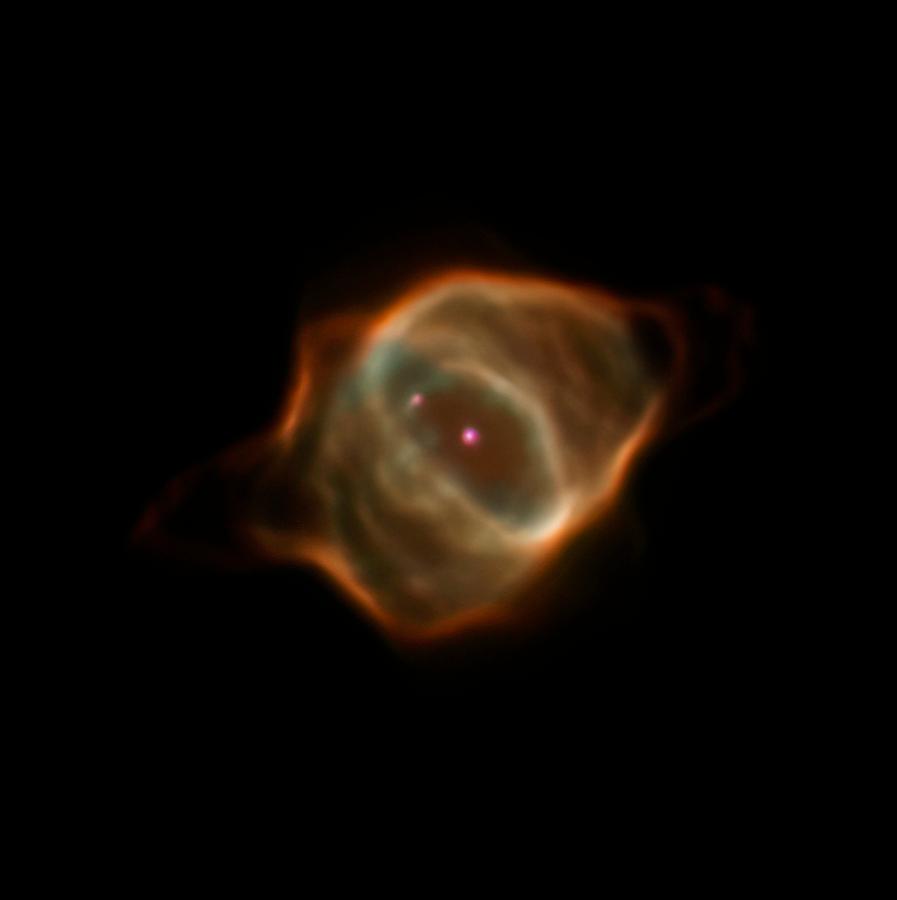

Hubble’s Observation of the Stingray Nebula in 2016

Archival data from the NASA/ESA Hubble Space Telescope reveal that the nebula Hen 3-1357, nicknamed the Stingray nebula, has faded precipitously over just the past two decades. Witnessing such a swift rate of change in a planetary nebula is exceedingly rare, say researchers.

This image captured by Hubble in 2016 shows how the nebula has drastically dimmed in brightness and changed shape. The young nebula no longer pops against the black velvet background of the distant Universe.

Credit: NASA, ESA, B. Balick (University of Washington), M. Guerrero (Instituto de Astrofísica de Andalucía), and G. Ramos-Larios (Universidad de Guadalajara)